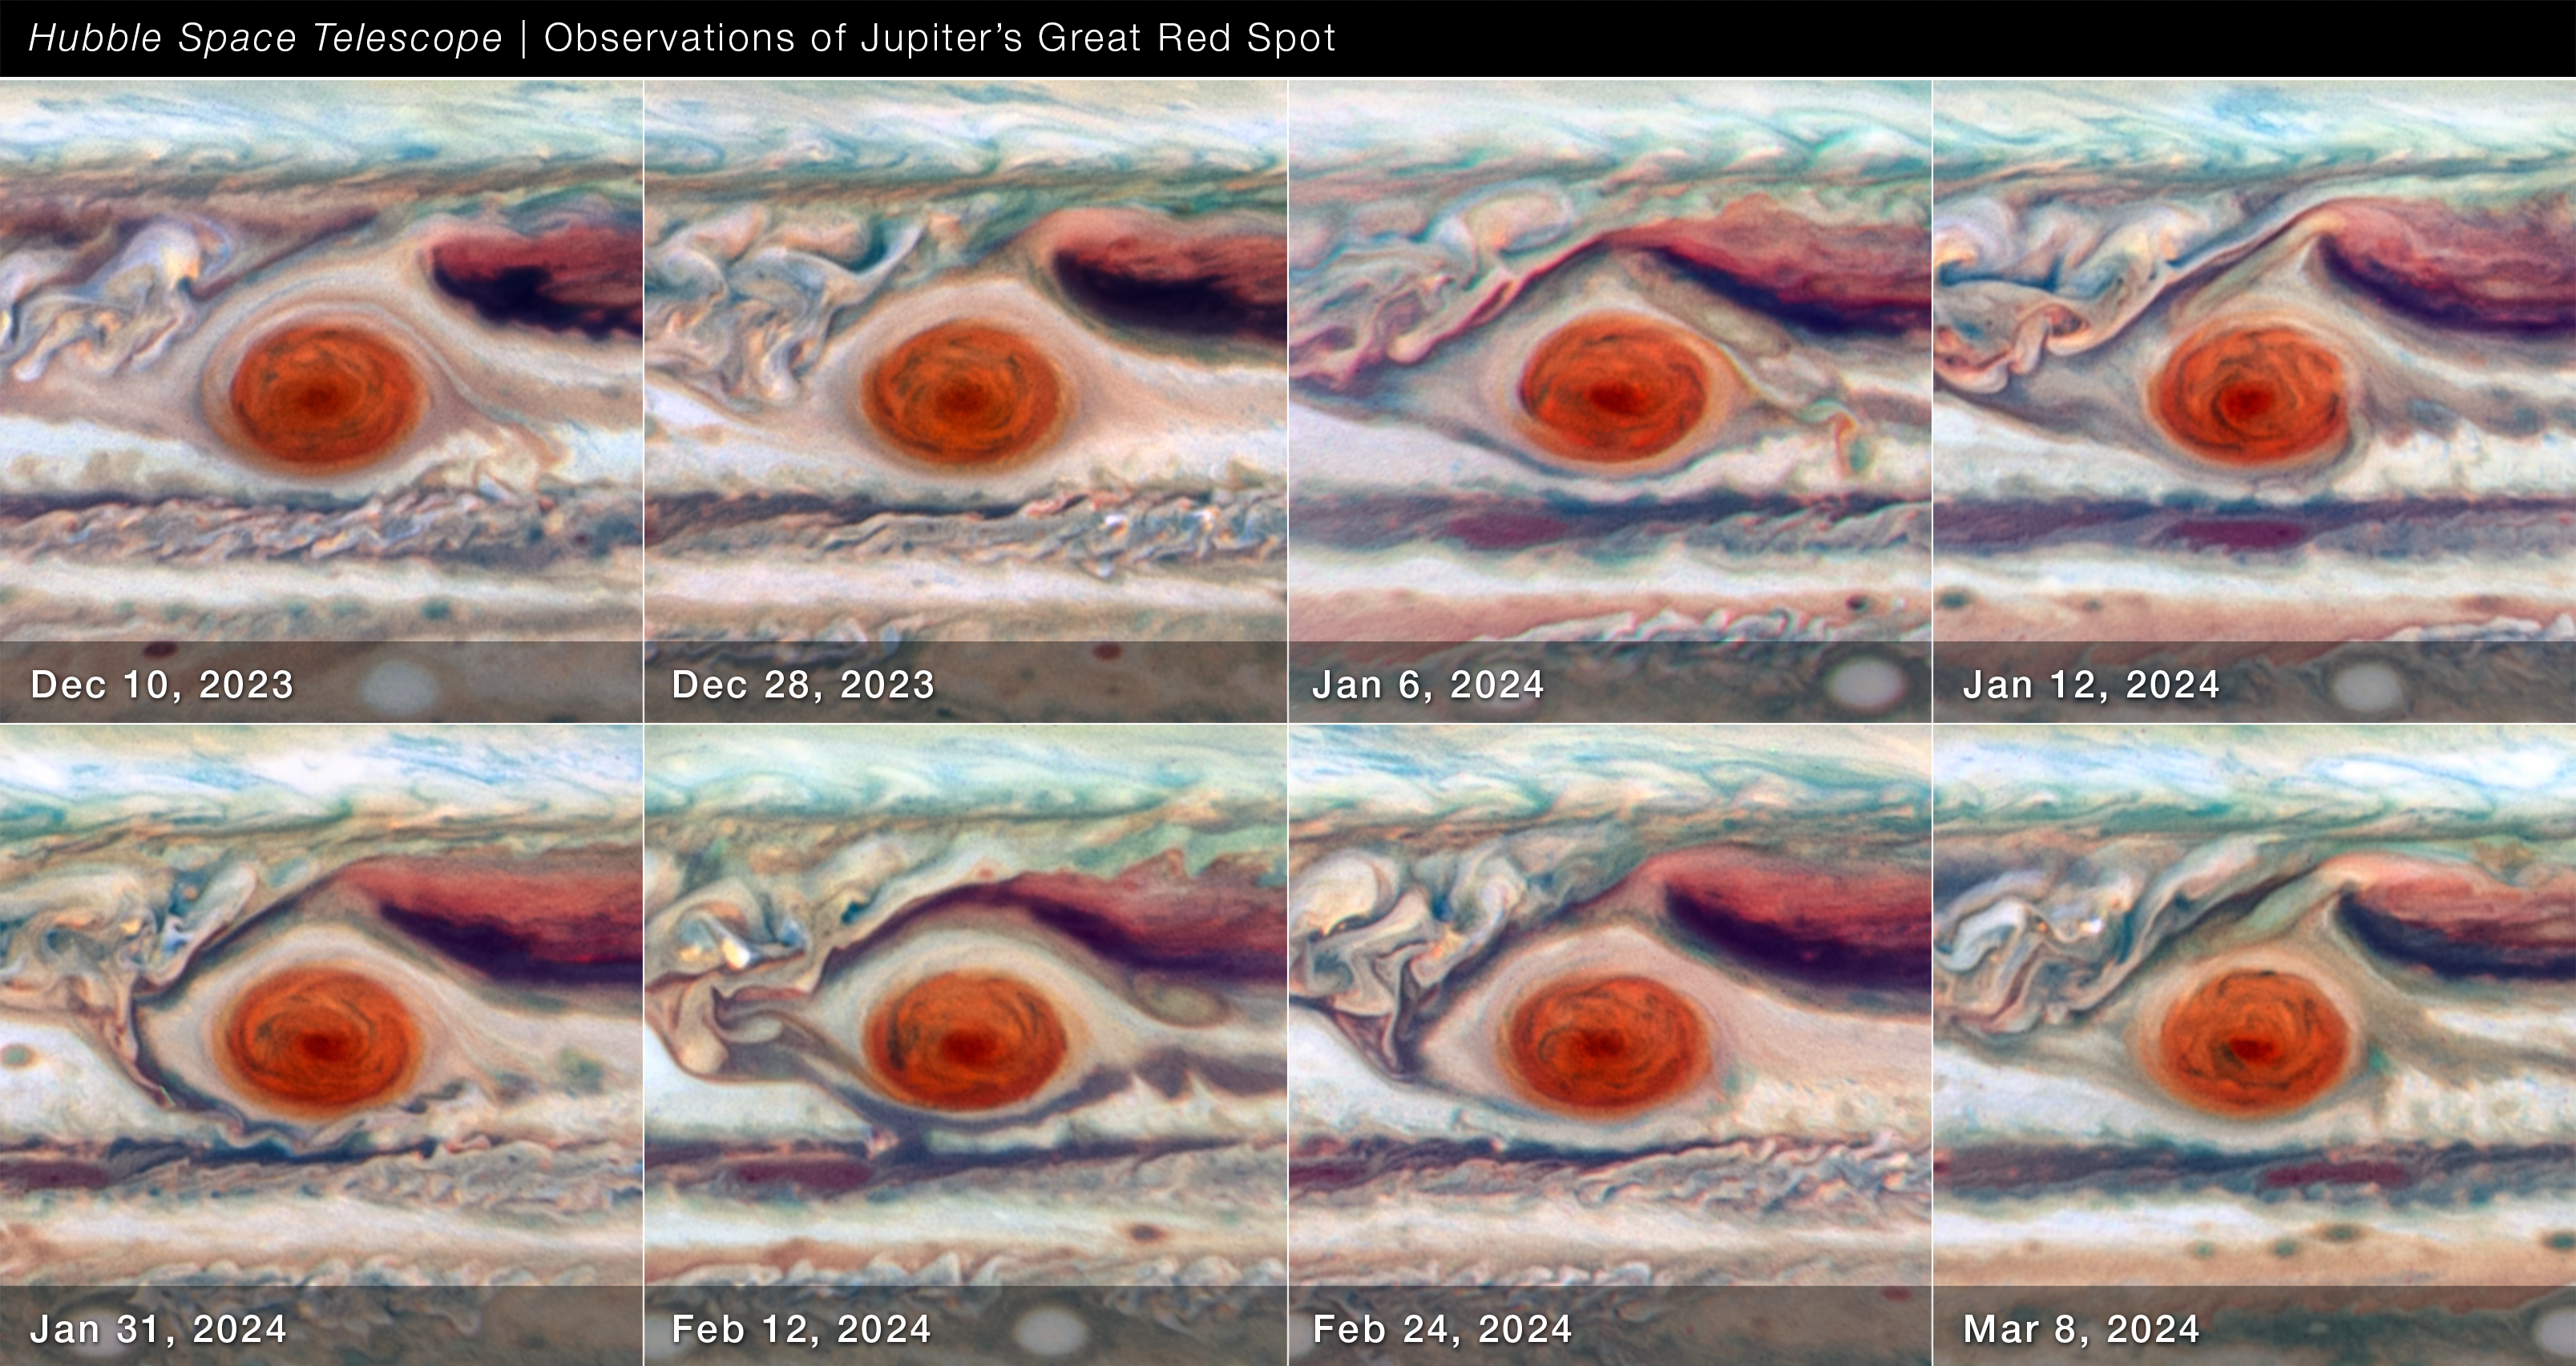

Close-up of Jupiter’s Great Red Spot (December 2023 to March 2024)

Using Hubble Space Telescope data spanning approximately 90 days (between December 2023 and March 2024) when the giant planet Jupiter was approximately 630 million to 820 million kilometres from the Sun, astronomers measured the Great Red Spot’s size, shape, brightness, colour, and vorticity over one full oscillation cycle. The data reveal that the Great Red Spot is not as stable as it might look. It was observed going through an oscillation in its elliptical shape, jiggling like a bowl of gelatin. The cause of the 90-day oscillation is unknown.

Credit: NASA, ESA, A. Simon (GSFC)